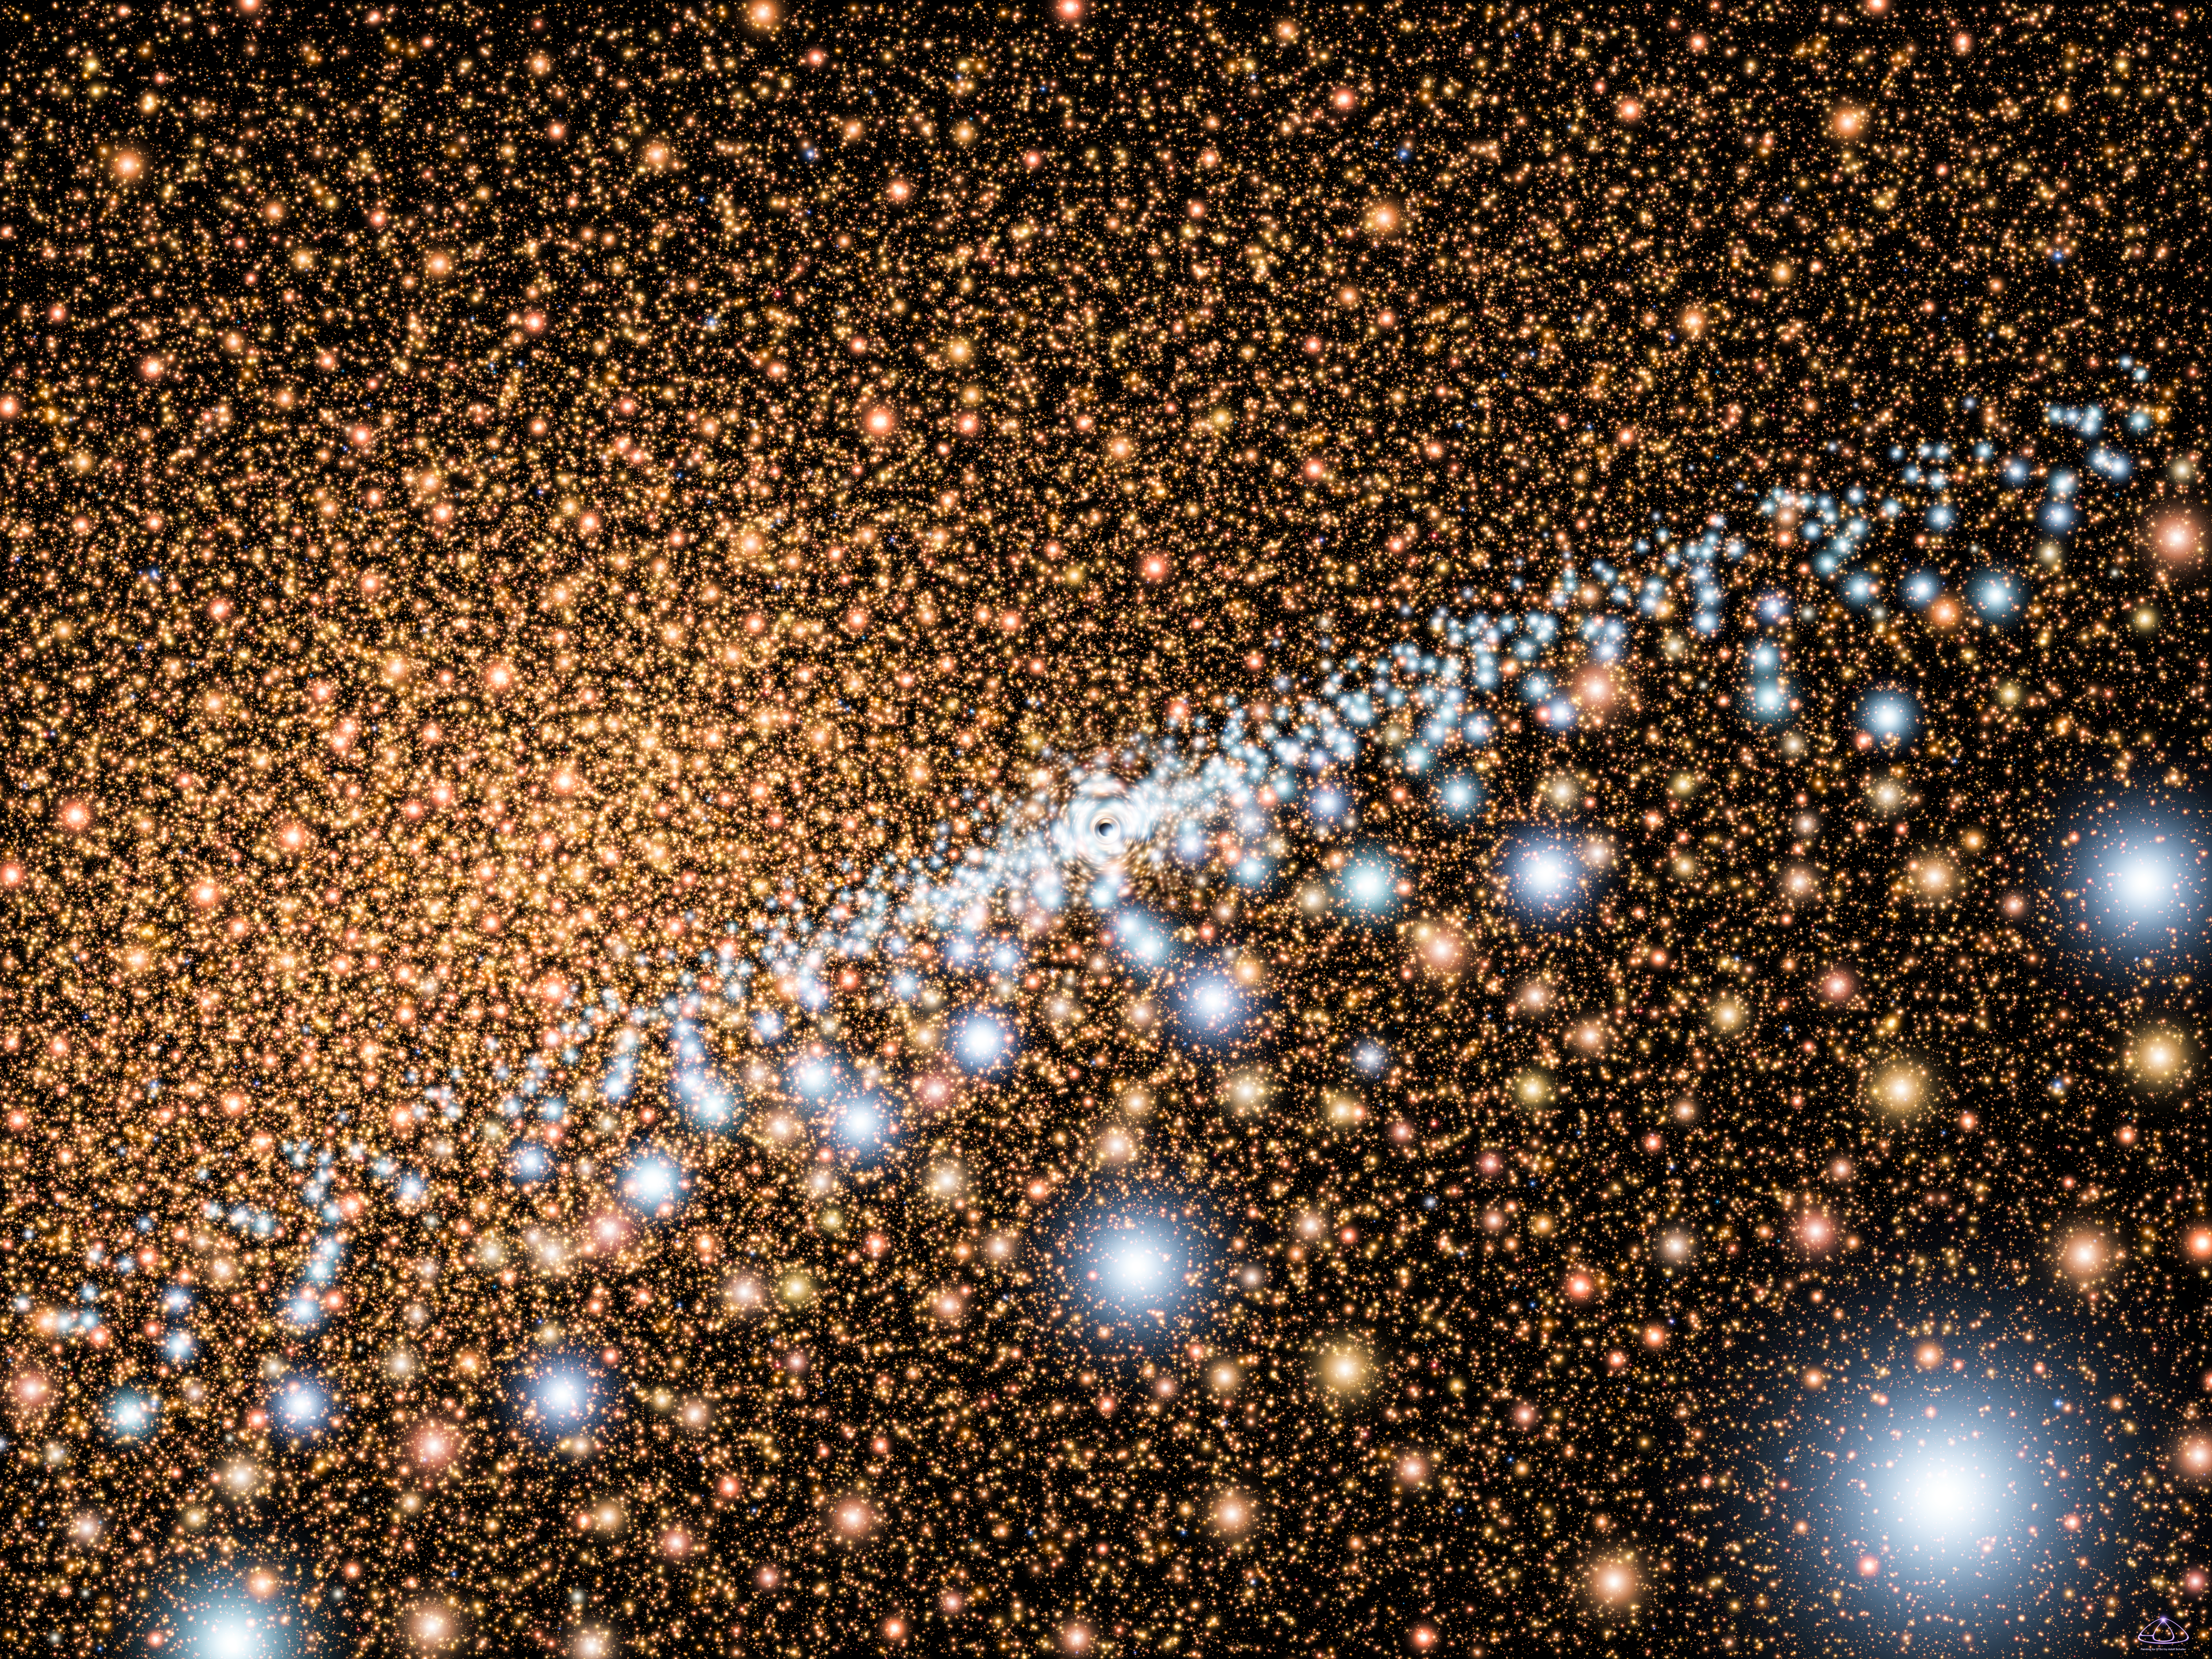

The Andromeda galaxy's active core (artist's impression)

This artist's concept shows a view across a mysterious disk of young, blue stars encircling a supermassive black hole at the core of the neighboring Andromeda Galaxy (M31). The region around the black hole is barely visible at the center of the disk. The background stars are the typical older, redder population of stars that inhabit the cores of most galaxies. Spectroscopic observations by the Hubble Space Telescope reveal that the blue light consists of more than 400 stars that formed in a burst of activity about 200 million years ago. The stars are tightly packed in a disk that is only a light-year across. Under the black hole's gravitational grip, the stars are traveling very fast: 2.2 million miles an hour (3.6 million kilometers an hour, or 1,000 kilometers a second).

Credit: NASA, ESA and A. Schaller (for STScI)